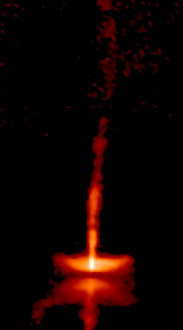

The dynamic HH-30 disk and jet (Frame 3)

This is how HH-30 looked in 2000.

Credit: NASA, Alan Watson (Universidad Nacional Autonoma de Mexico), Karl Stapelfeldt (Jet Propulsion Laboratory), John Krist and Chris Burrows (European Space Agency/ Space Telescope Science Institute).